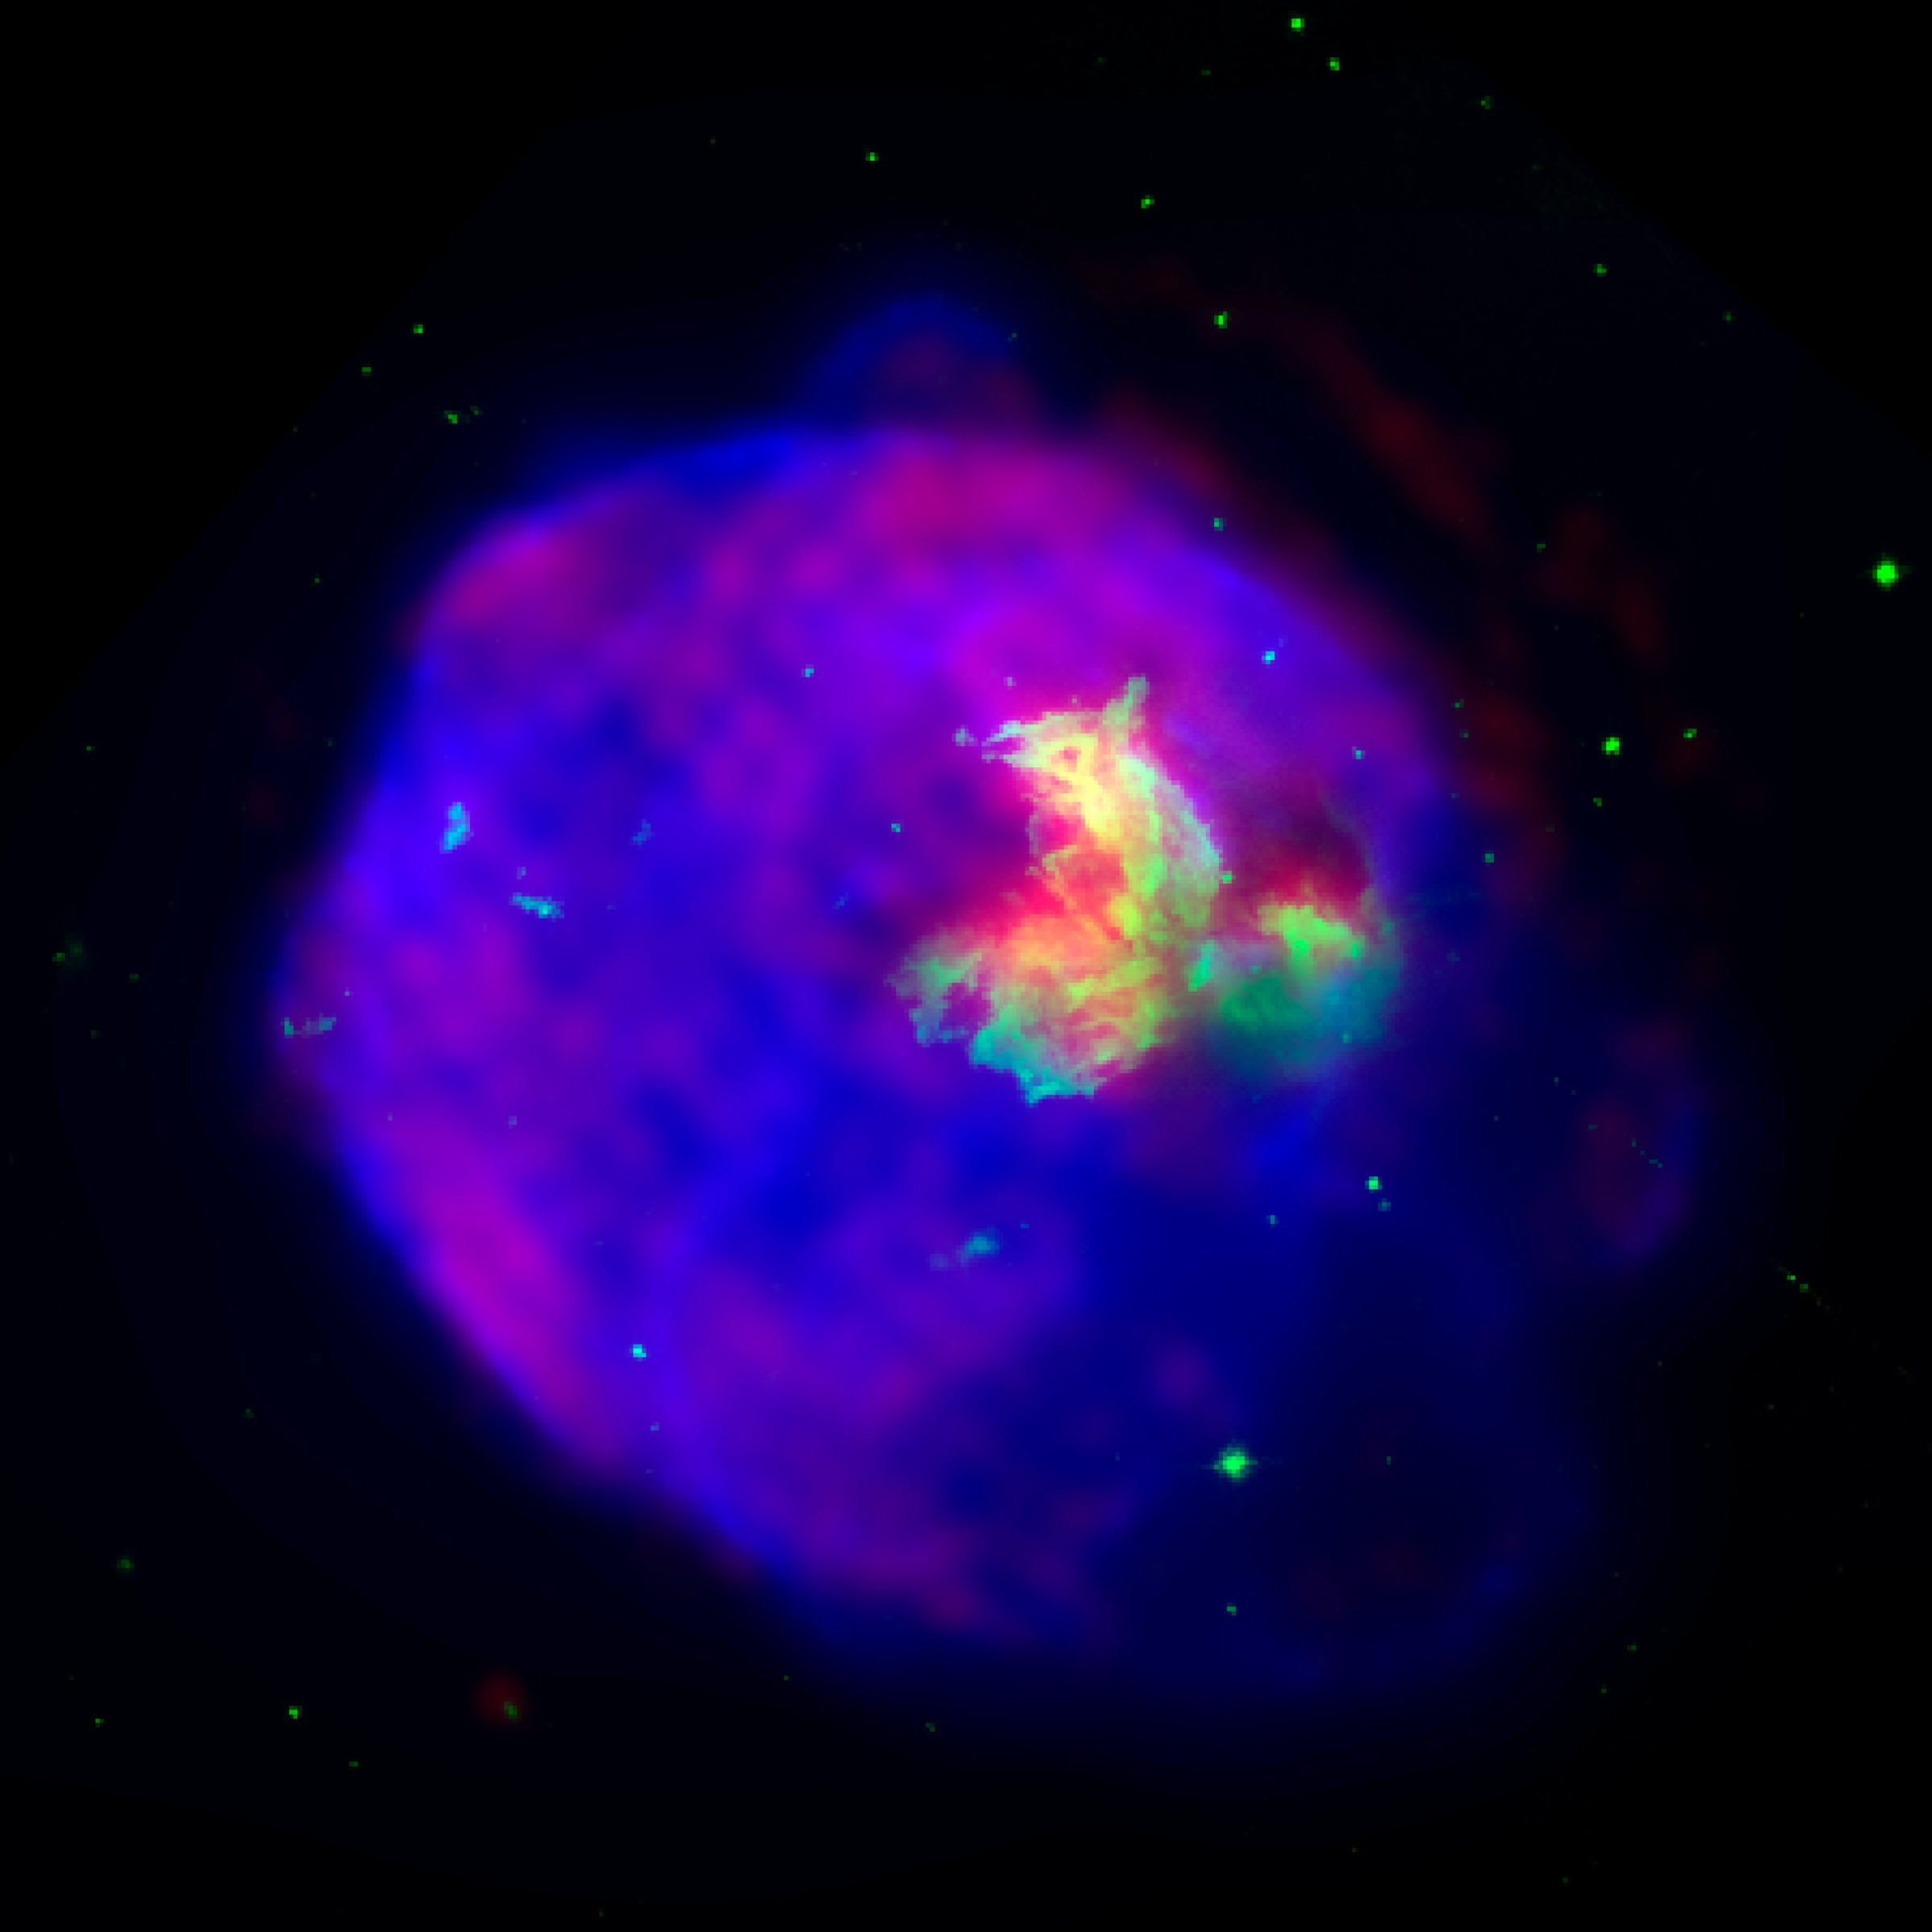

N 63A: Chandra and Hubble

Chandra has imaged the glowing shell created by the destruction of a massive star. X-rays from Chandra (blue), combined with optical (green) and radio (red) data, reveal new details in the supernova remnant, LMC N 63A. The X-ray glow is from material heated to about ten million degrees Celsius by a shock wave generated by the supernova explosion. The age of the remnant is estimated to be in the range of 2,000 to 5,000 years.

Credit: X-ray: NASA/CXC/Rutgers/J.Warren et al.; Optical: NASA/STScI/U. Ill/Y.Chu; Radio: ATCA/U. Ill/J.Dickel et al.